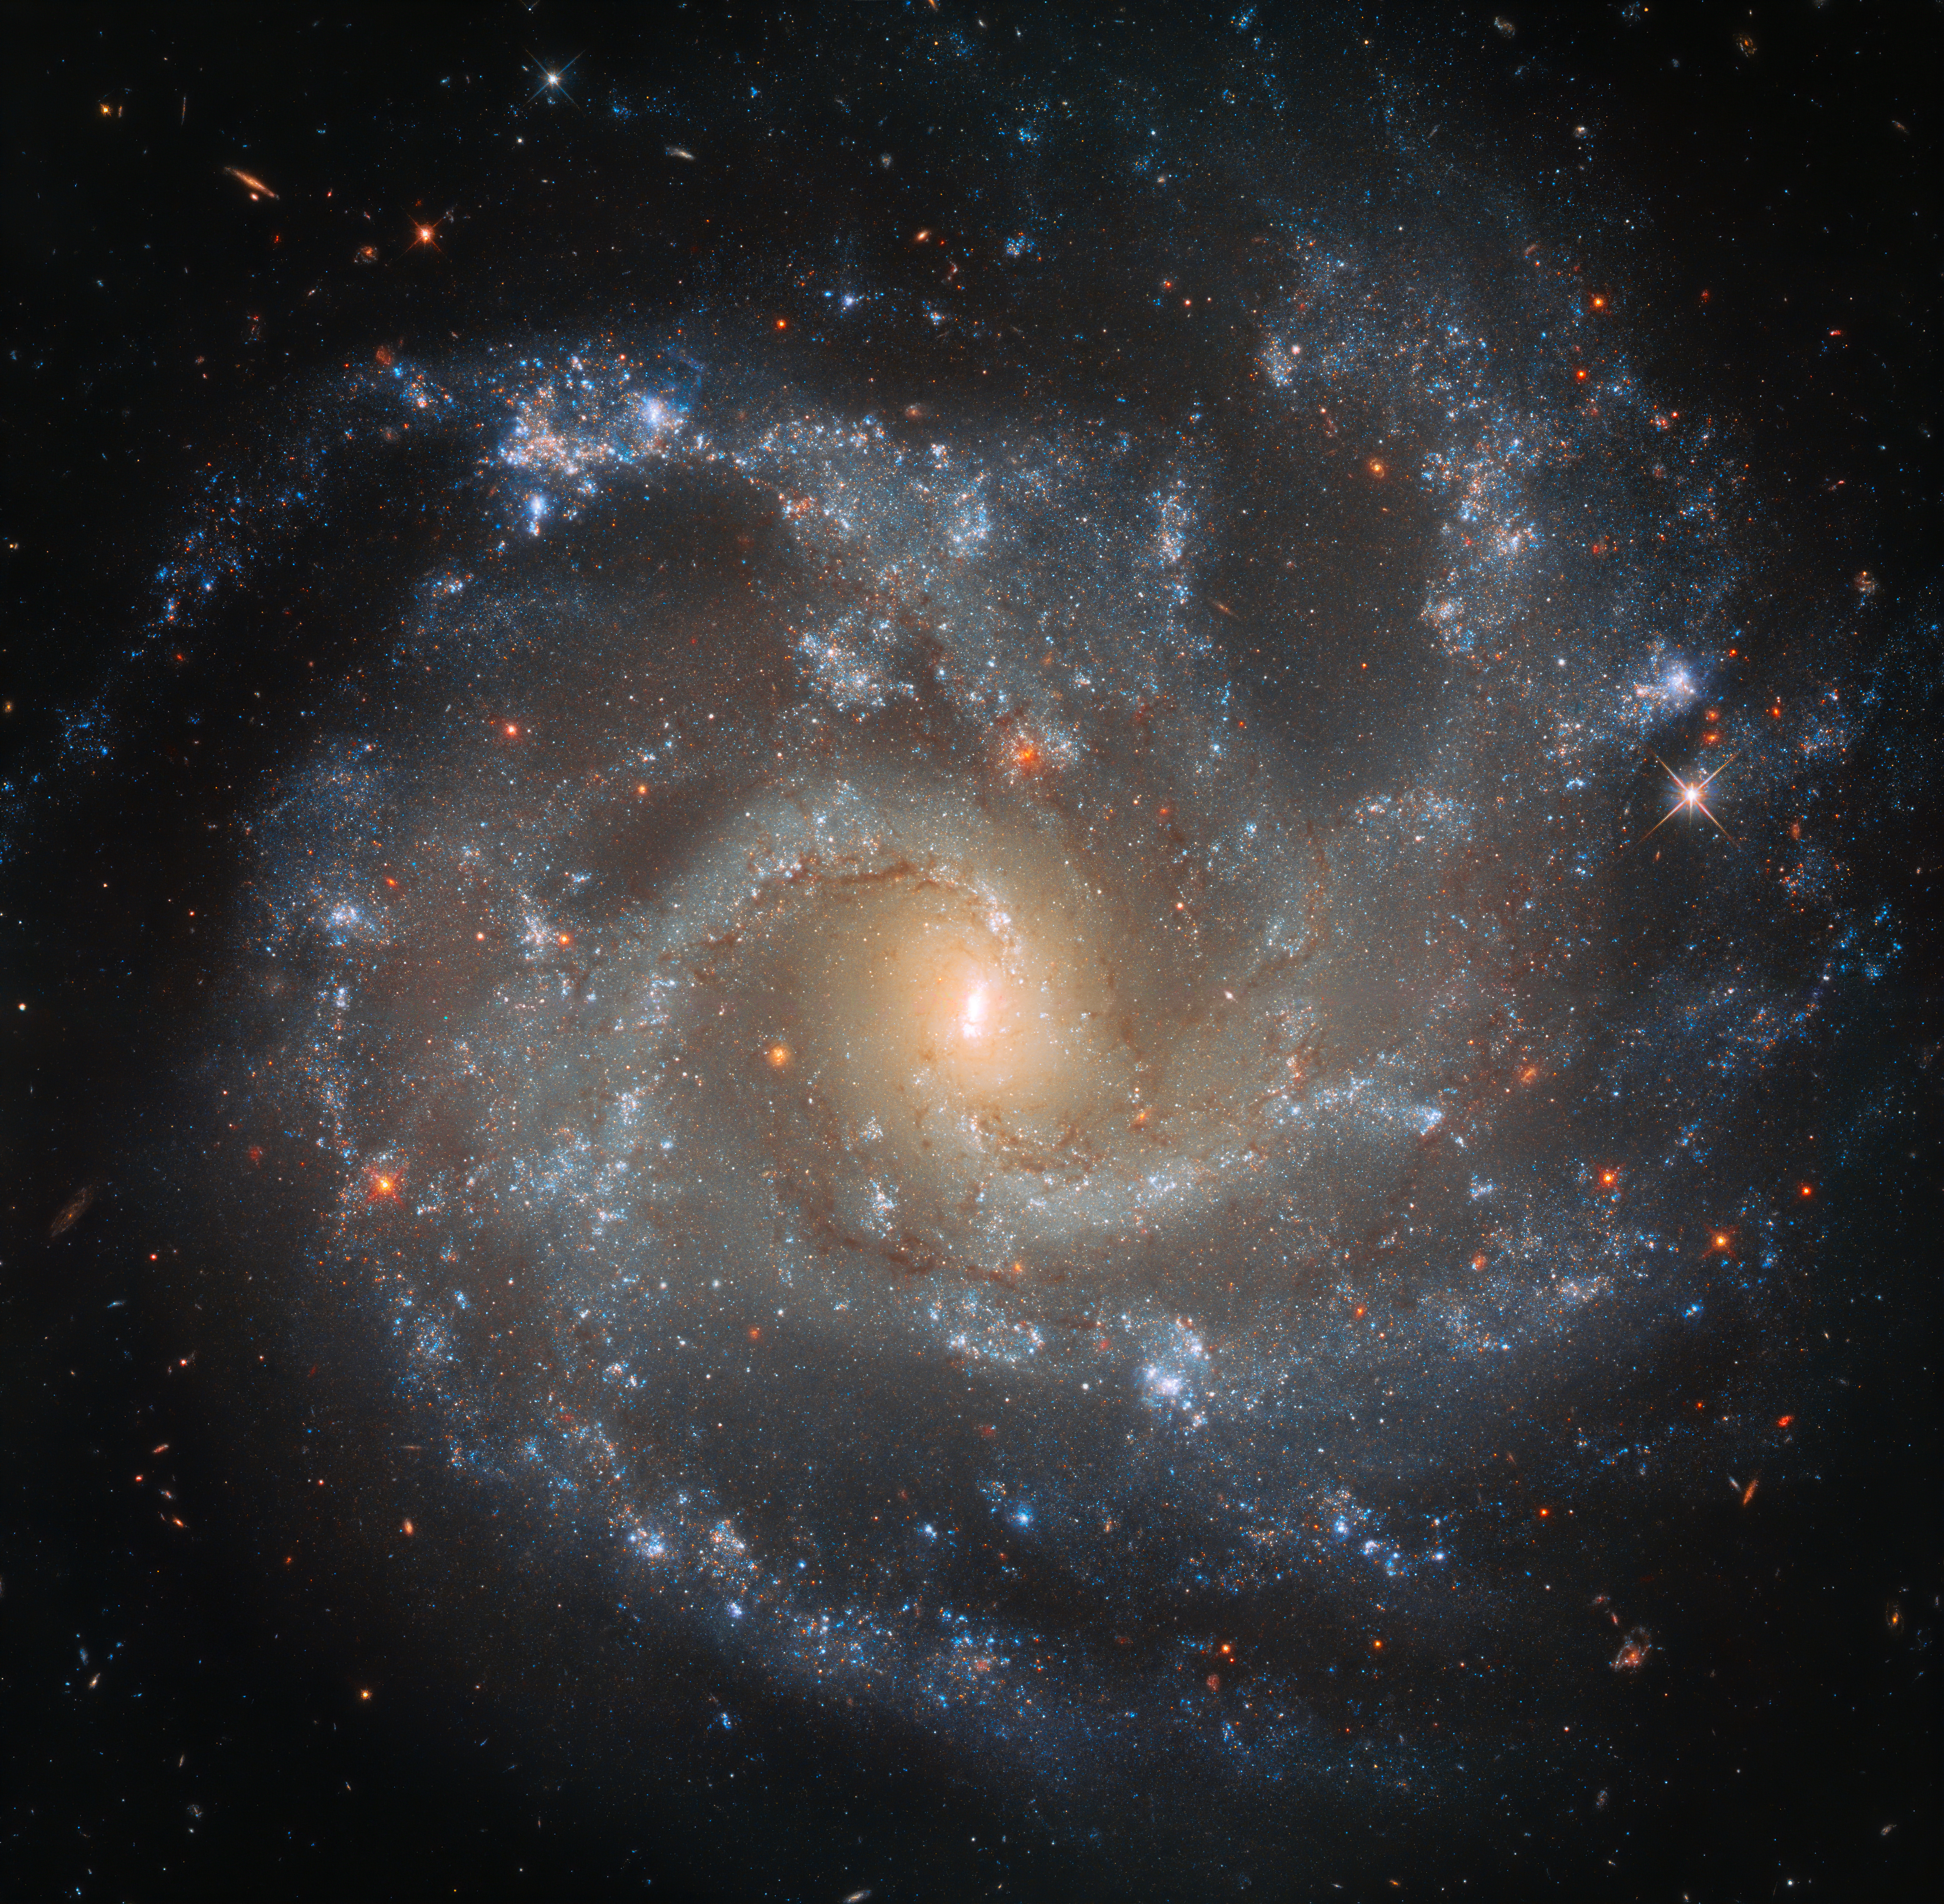

A Dramatic Demise

Some of the most dramatic events in the Universe occur when certain stars die — and explode catastrophically in the process.

Such explosions, known as supernovae, mainly occur in a couple of ways: either a massive star depletes its fuel at the end of its life, become dynamically unstable and unable to support its bulk, collapses inwards, and then violently explodes; or a white dwarf in an orbiting stellar couple syphons more mass off its companion than it is able to support, igniting runaway nuclear fusion in its core and beginning the supernova process. Both types result in an intensely bright object in the sky that can rival the light of a whole galaxy.

In the last 20 years the galaxy NGC 5468, visible in this image, has hosted a number of observed supernovae of both the aforementioned types: SN 1999cp, SN 2002cr, SN2002ed, SN2005P, and SN2018dfg. Despite being just over 130 million light-years away, the orientation of the galaxy with respect to us makes it easier to spot these new ‘stars’ as they appear; we see NGC 5468 face on, meaning we can see the galaxy’s loose, open spiral pattern in beautiful detail in images such as this one from the NASA/ESA Hubble Space Telescope.

Credit: ESA/Hubble & NASA, A. Riess et al.
Acknowledgements: Judy Schmidt (Geckzilla)